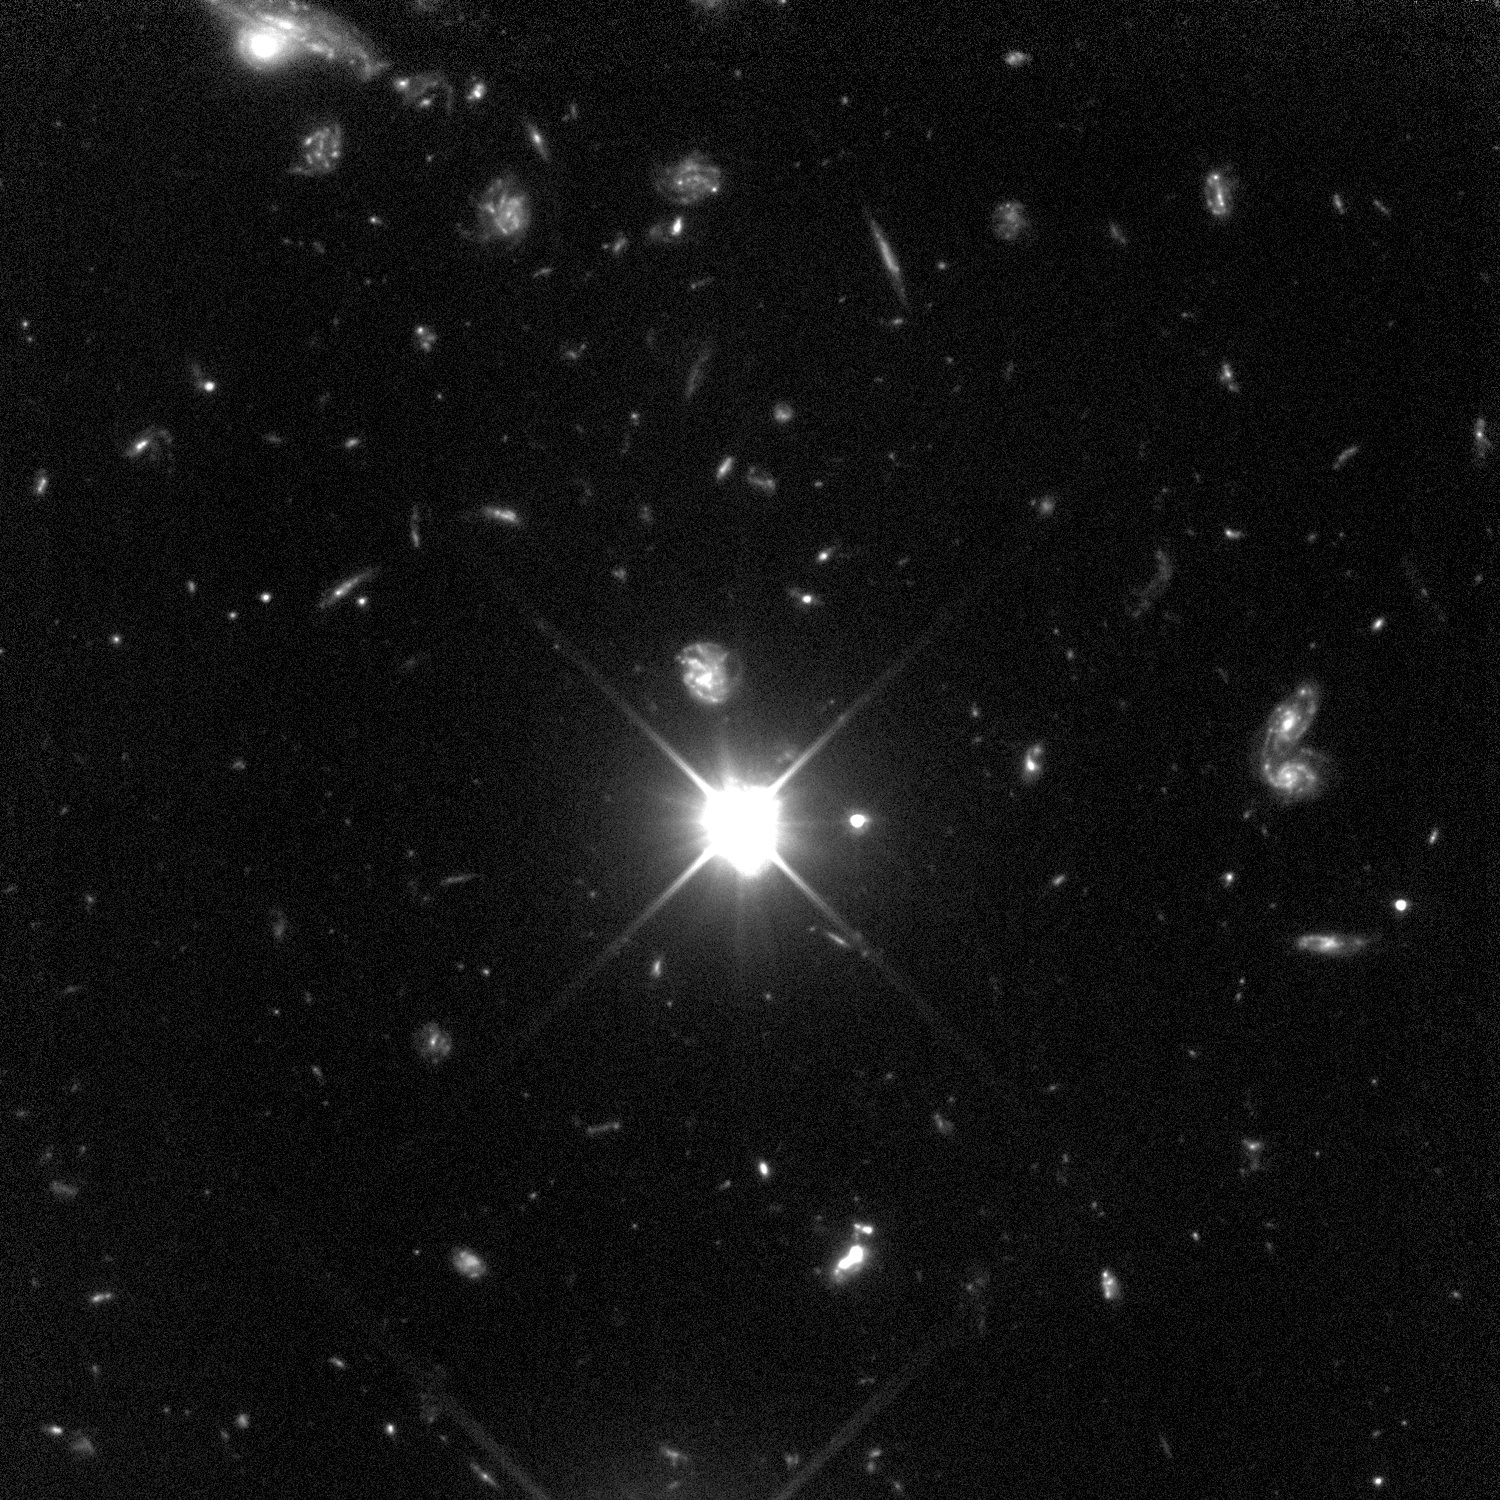

HDF Southern Field (Hubble STIS View)

The deepest visible/ultraviolet light image of the universe ever taken, revealing galaxies down to 30th magnitude. Glaring fiercely across 12 billion light-years of space is the brilliant beacon of a distant quasar (z=2.2). Most of the galaxies in this view lie between us and the quasar. The image was taken with the camera on the Space Telescope Imaging Spectrograph (STIS). The STIS recorded how numerous invisible intervening clouds of hydrogen gas affected the quasar's light. Some of the galaxies in the image may be linked to these clouds.

Credit: R. Williams (STScI), the HDF-S Team, and NASA/ESA